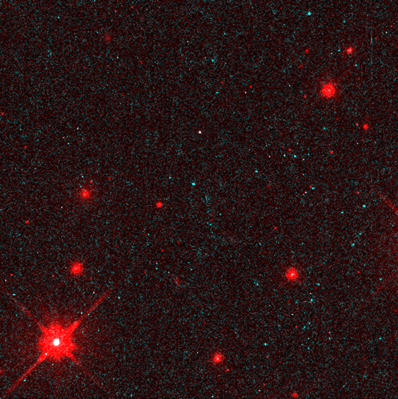

Hubble Sees a Neutron Star Alone in Space

This is the first direct look, in visible light, at a lone neutron star, as seen by the NASA/ESA Hubble Space Telescope. The Hubble results show the star is very hot (1.2 million degrees Fahrenheit at the surface), and can be no larger than 16.8 miles (28 kilometers) across. These results prove that the object must be a neutron star, because no other known type of object can be this hot, small, and dim (below 25th magnitude).

Credit: Fred Walter (State University of New York at Stony Brook), and NASA/ESA